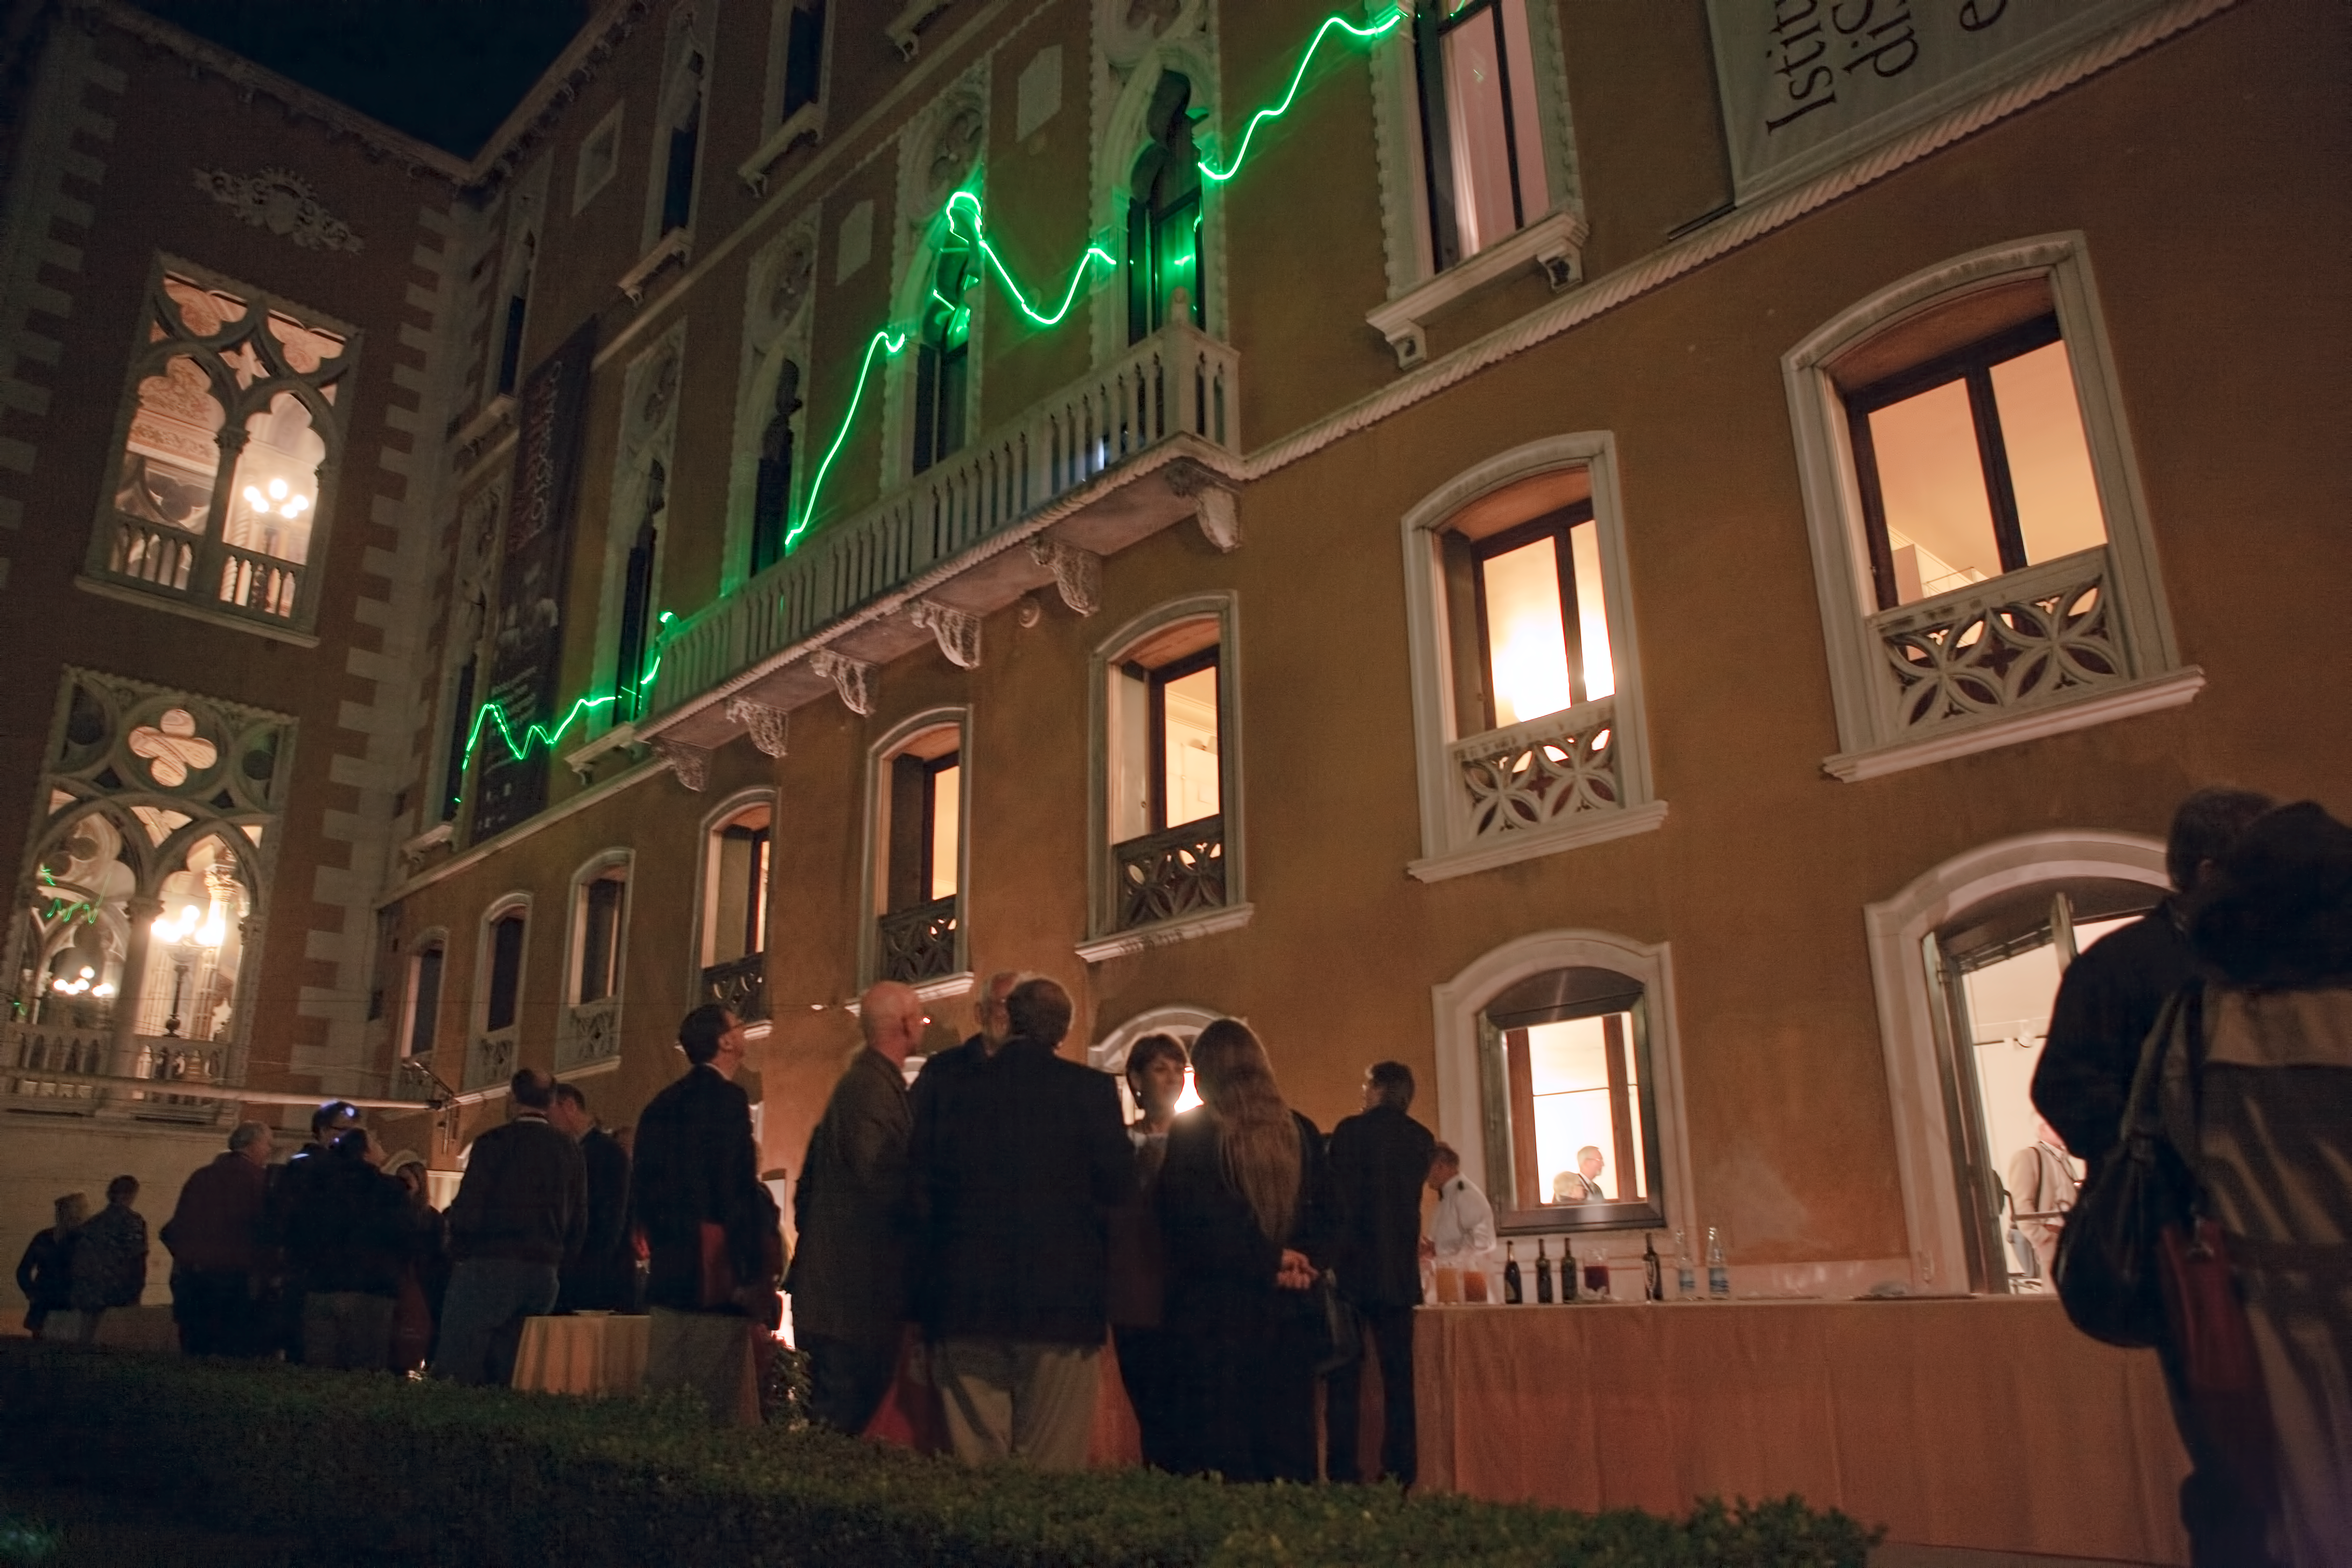

From the distant past

From the Distant Past, a laser art installation by German artist Tim Otto Roth. A green scanning laser projects spectra from distant galaxies onto the wall of the Palazzo Cavalli-Franchetti in Venice, during the Science with the Hubble Space Telescope III conference in Venice, Italy, in October 2010.

Credit: NASA & ESA